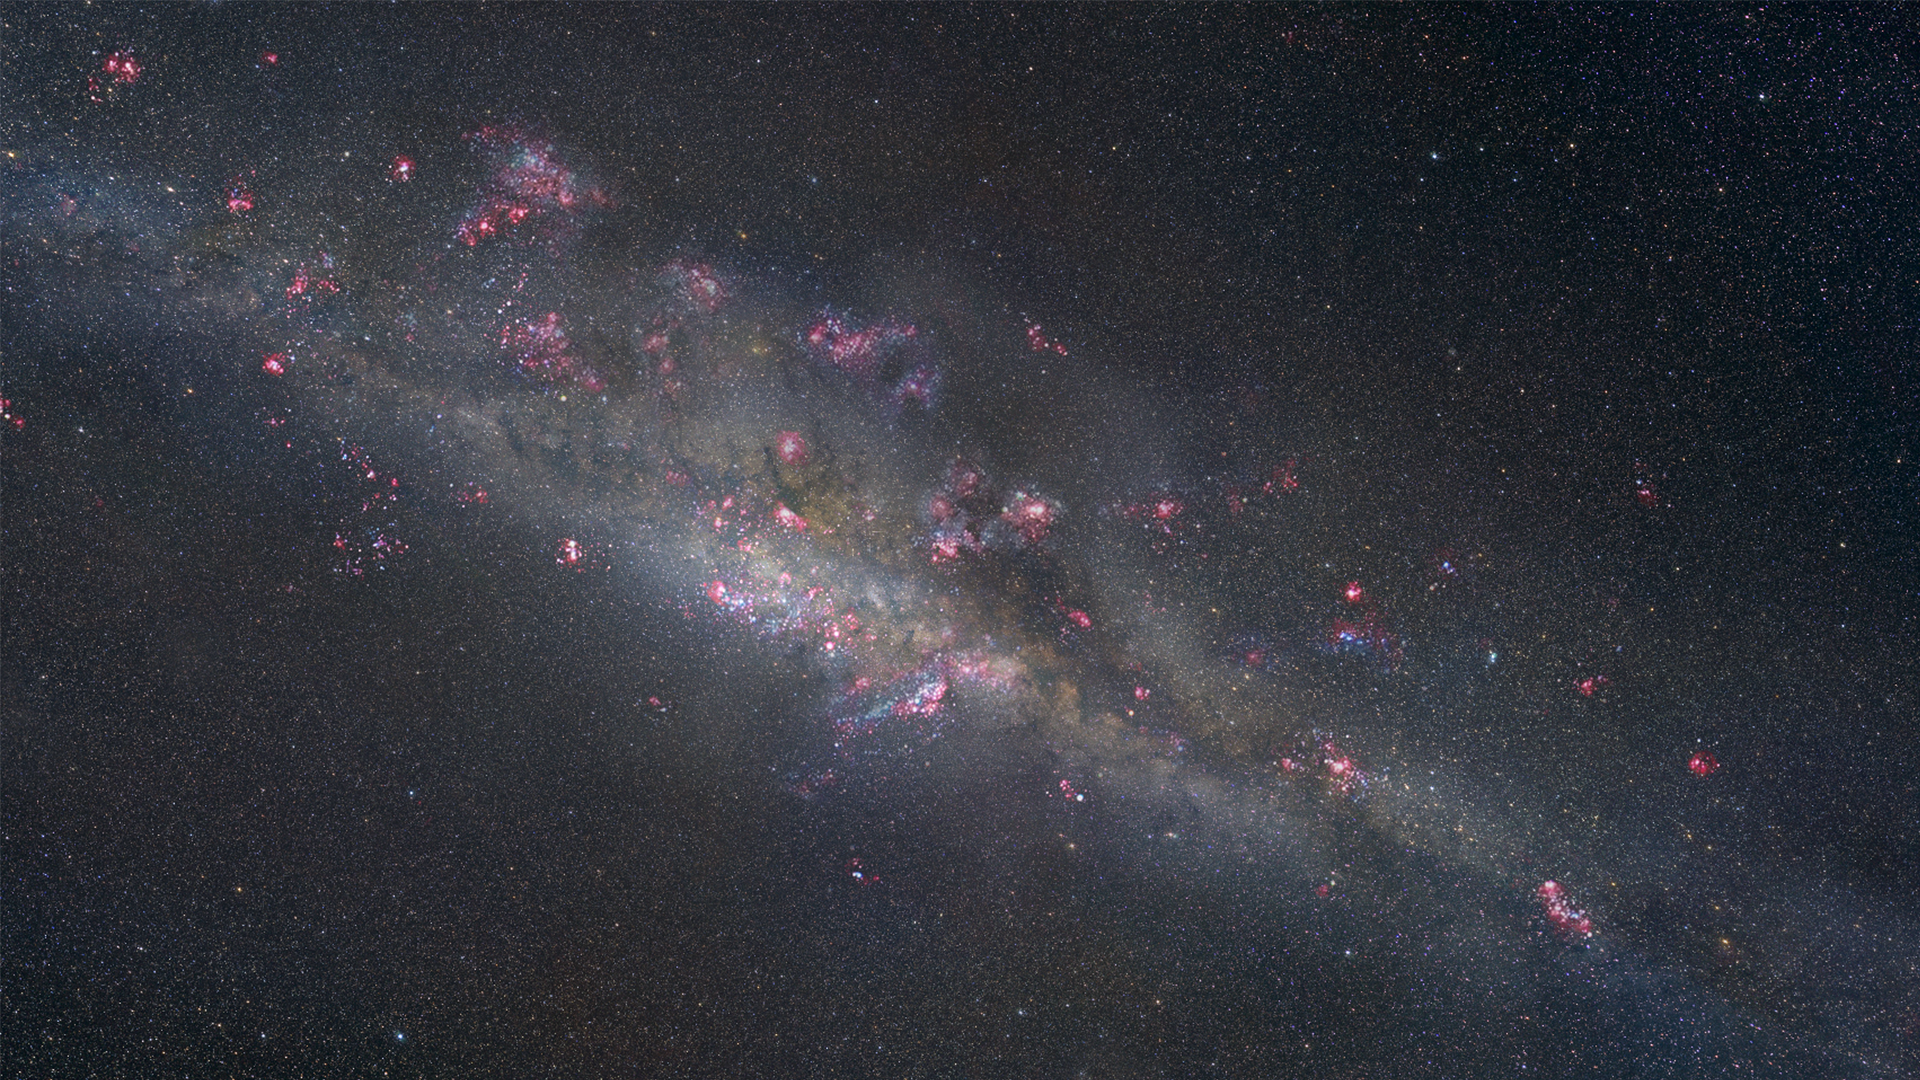

Artist's illustration of unlensed source galaxy

This artist’s illustration portrays what the gravitationally lensed galaxy SDSS J1110+6459 might look like up close. A sea of young, blue stars is streaked with dark dust lanes and studded with bright pink patches that mark sites of ongoing star formation. The patches’ signature glow comes from ionized hydrogen, like we see in the Orion Nebula in our own galaxy.

According to new research, these distant star-formation regions are clumpy and span about 200 to 300 light-years. This contradicts earlier theories suggesting that such regions might be much larger, 3000 light-years or more in size.

Credit: NASA, ESA, and Z. Levay (STScI)